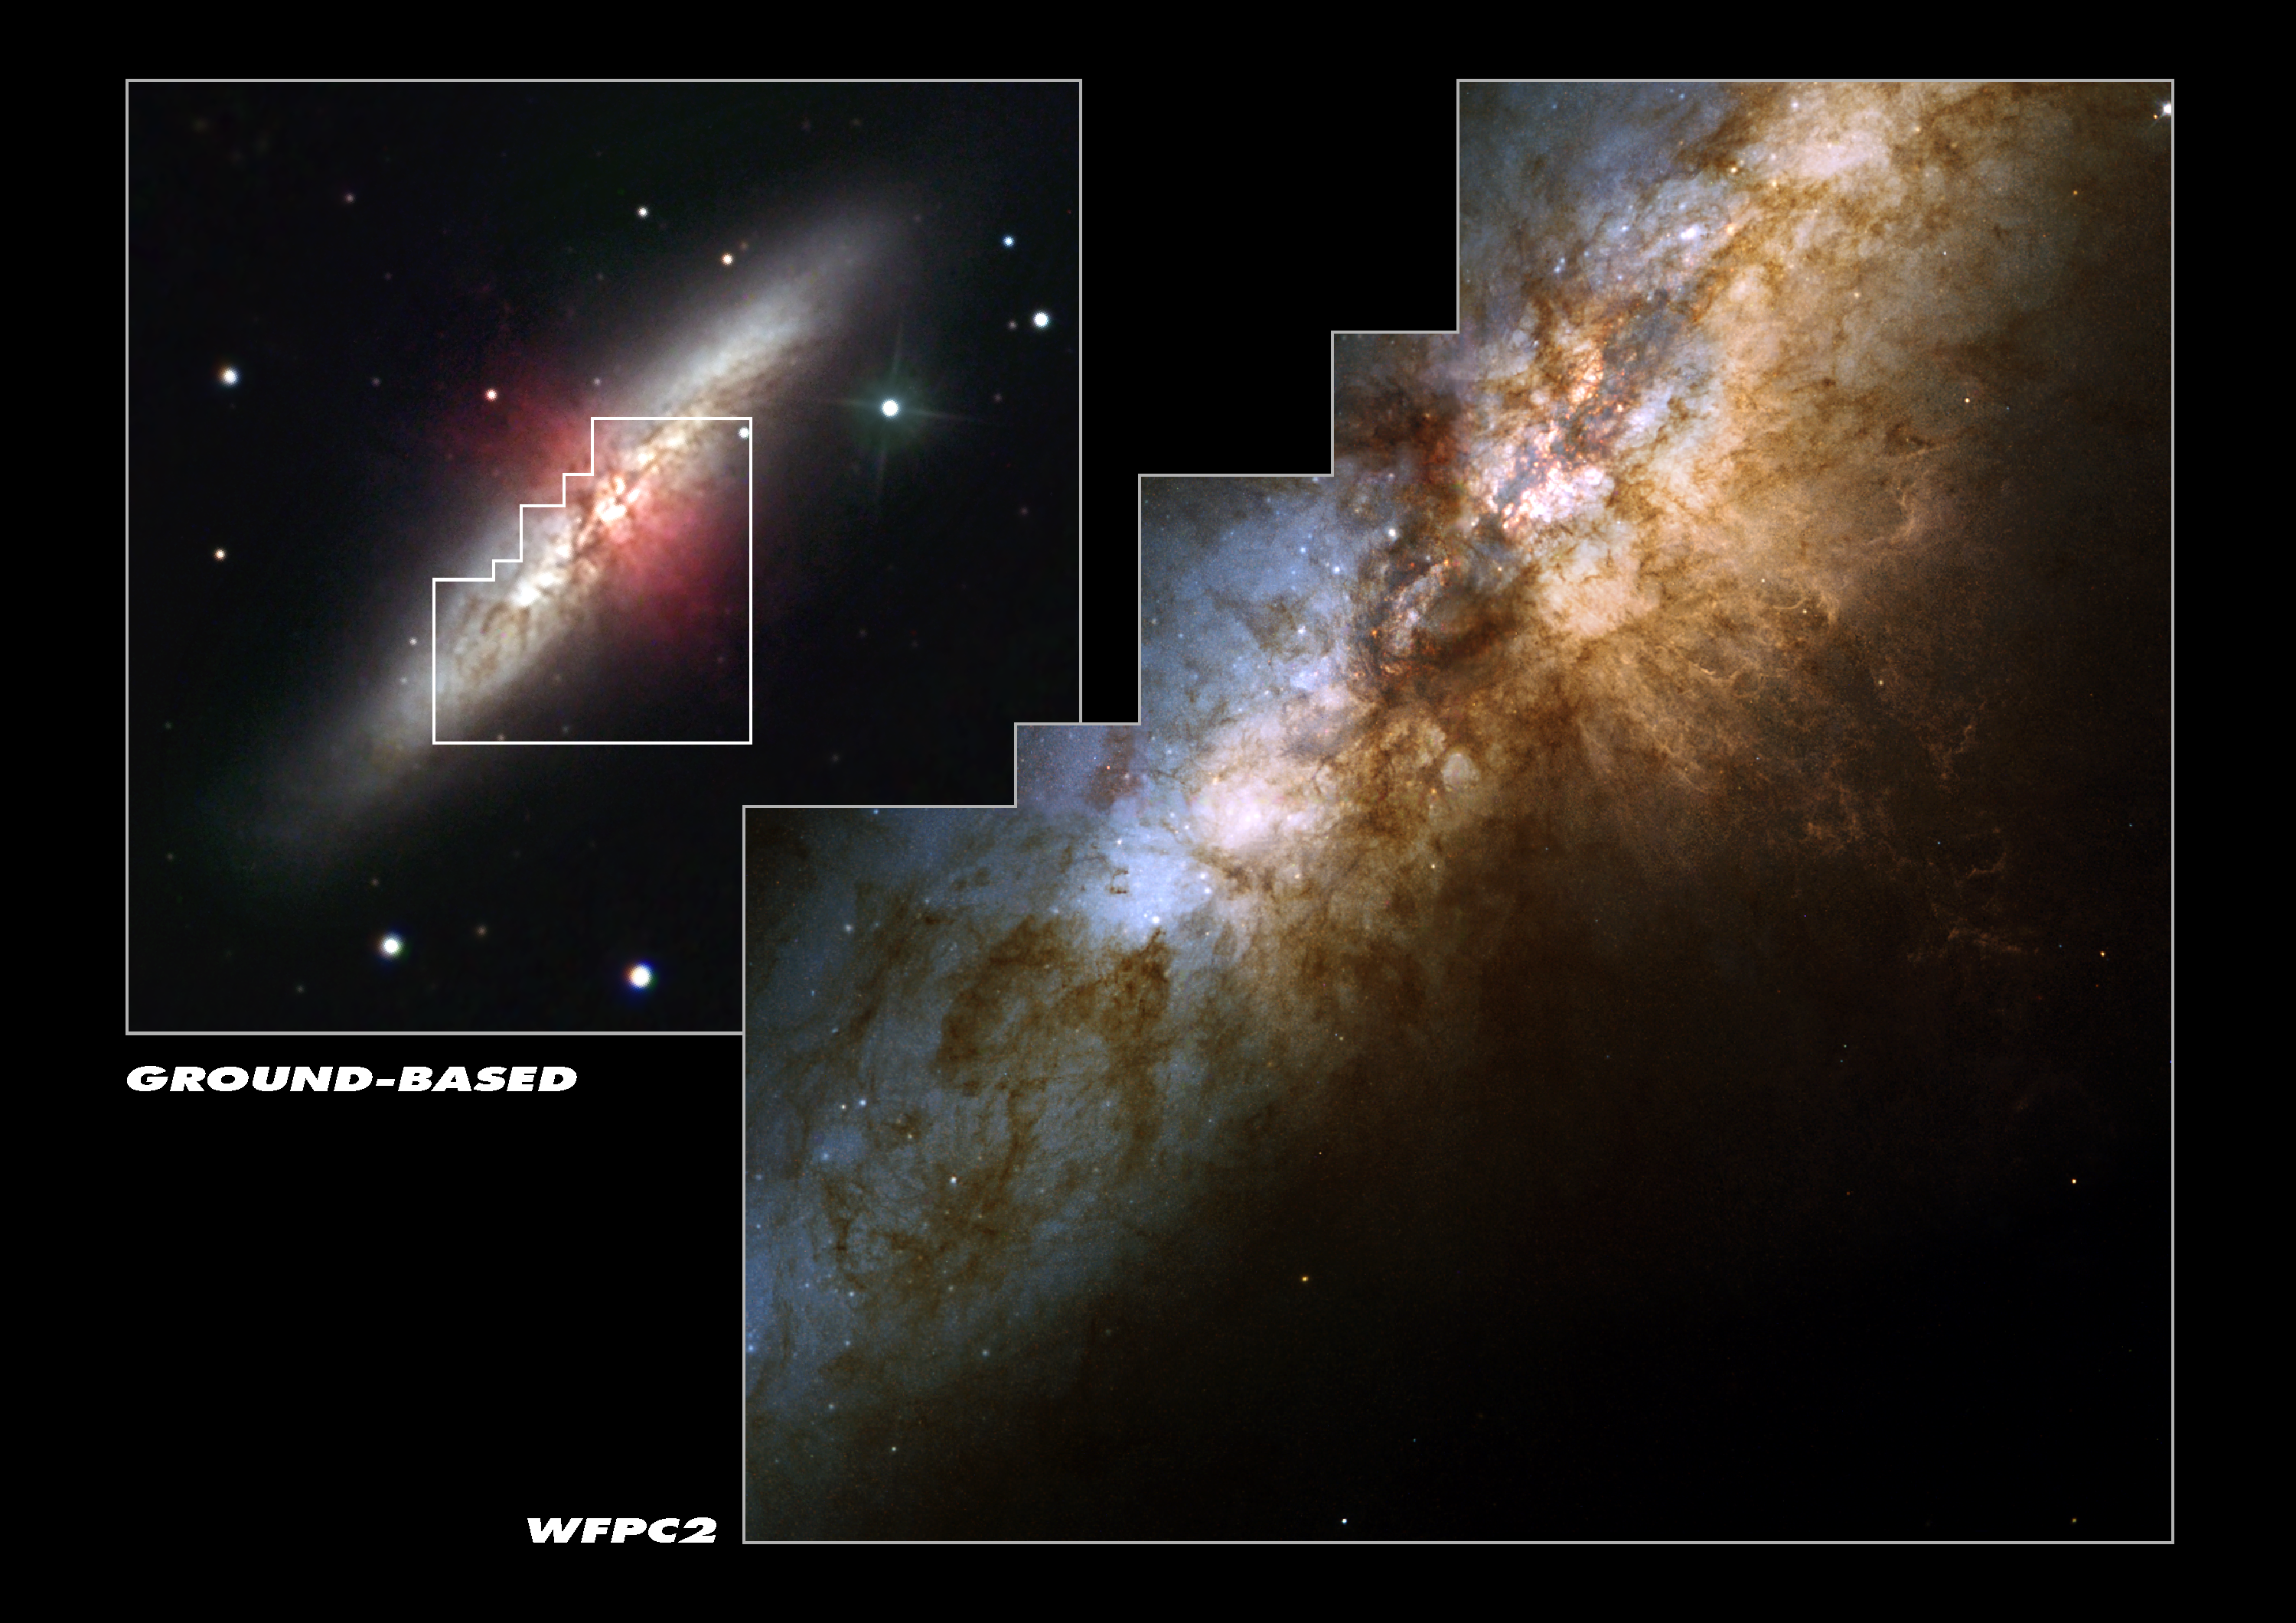

Hubble spies huge clusters of stars formed by ancient encounter

This stunningly beautiful image taken with the NASA/ESA Hubble Space Telescope shows the heart of the prototypical starburst galaxy M82. The ongoing violent star formation due to an ancient encounter with its large galactic neighbour, M81, gives this galaxy its disturbed appearance. The smaller ground-based picture at upper left shows the entire galaxy. The image was taken by Robert Gendler with a 12 inch telescope from a suburb outside Hartford, Connecticut. Hubble's view is represented by the white outline in the centre. In the Hubble image, taken by the Wide Field and Planetary Camera 2, the huge lanes of dust that crisscross M82's disk are another telltale sign of the flurry of star formation. Below the centre and to the right, a strong galactic wind is spewing knotty filaments of hydrogen and nitrogen gas. More than 100 super star clusters - very bright, compact groupings of about 100, 000 stars - are seen in this detailed Hubble picture as white dots sprinkled throughout M82's central region. The dark region just above the centre of the picture is a huge dust cloud. A collaboration of European and American scientists used these clusters to date the ancient interaction between M82 and M81. About 600 million years ago, a region called 'M82 B' (the bright area just below and to the left of the central dust cloud) exploded with new stars. Scientists have discovered that this ancient starburst was triggered by the violent encounter with M81. M82 is a bright (eighth magnitude), nearby (12 million light-years from Earth) galaxy in the constellation Ursa Major (the Great Bear). The Hubble picture was taken on September 15, 1997. The natural-colour composite was constructed from three Wide Field and Planetary Camera 2 exposures, which were combined in chromatic order: 4, 250 seconds through a blue filter (428 nm); 2, 800 seconds through a green filter (520 nm); and 2, 200 seconds through a red (820 nm) filter. Credits for Hubble image: NASA, ESA, R. de Grijs (Institute of Astronomy, Cambridge, UK) This image is issued jointly by NASA and ESA.

Credit: NASA, ESA, R. de Grijs (Institute of Astronomy, Cambridge, UK)